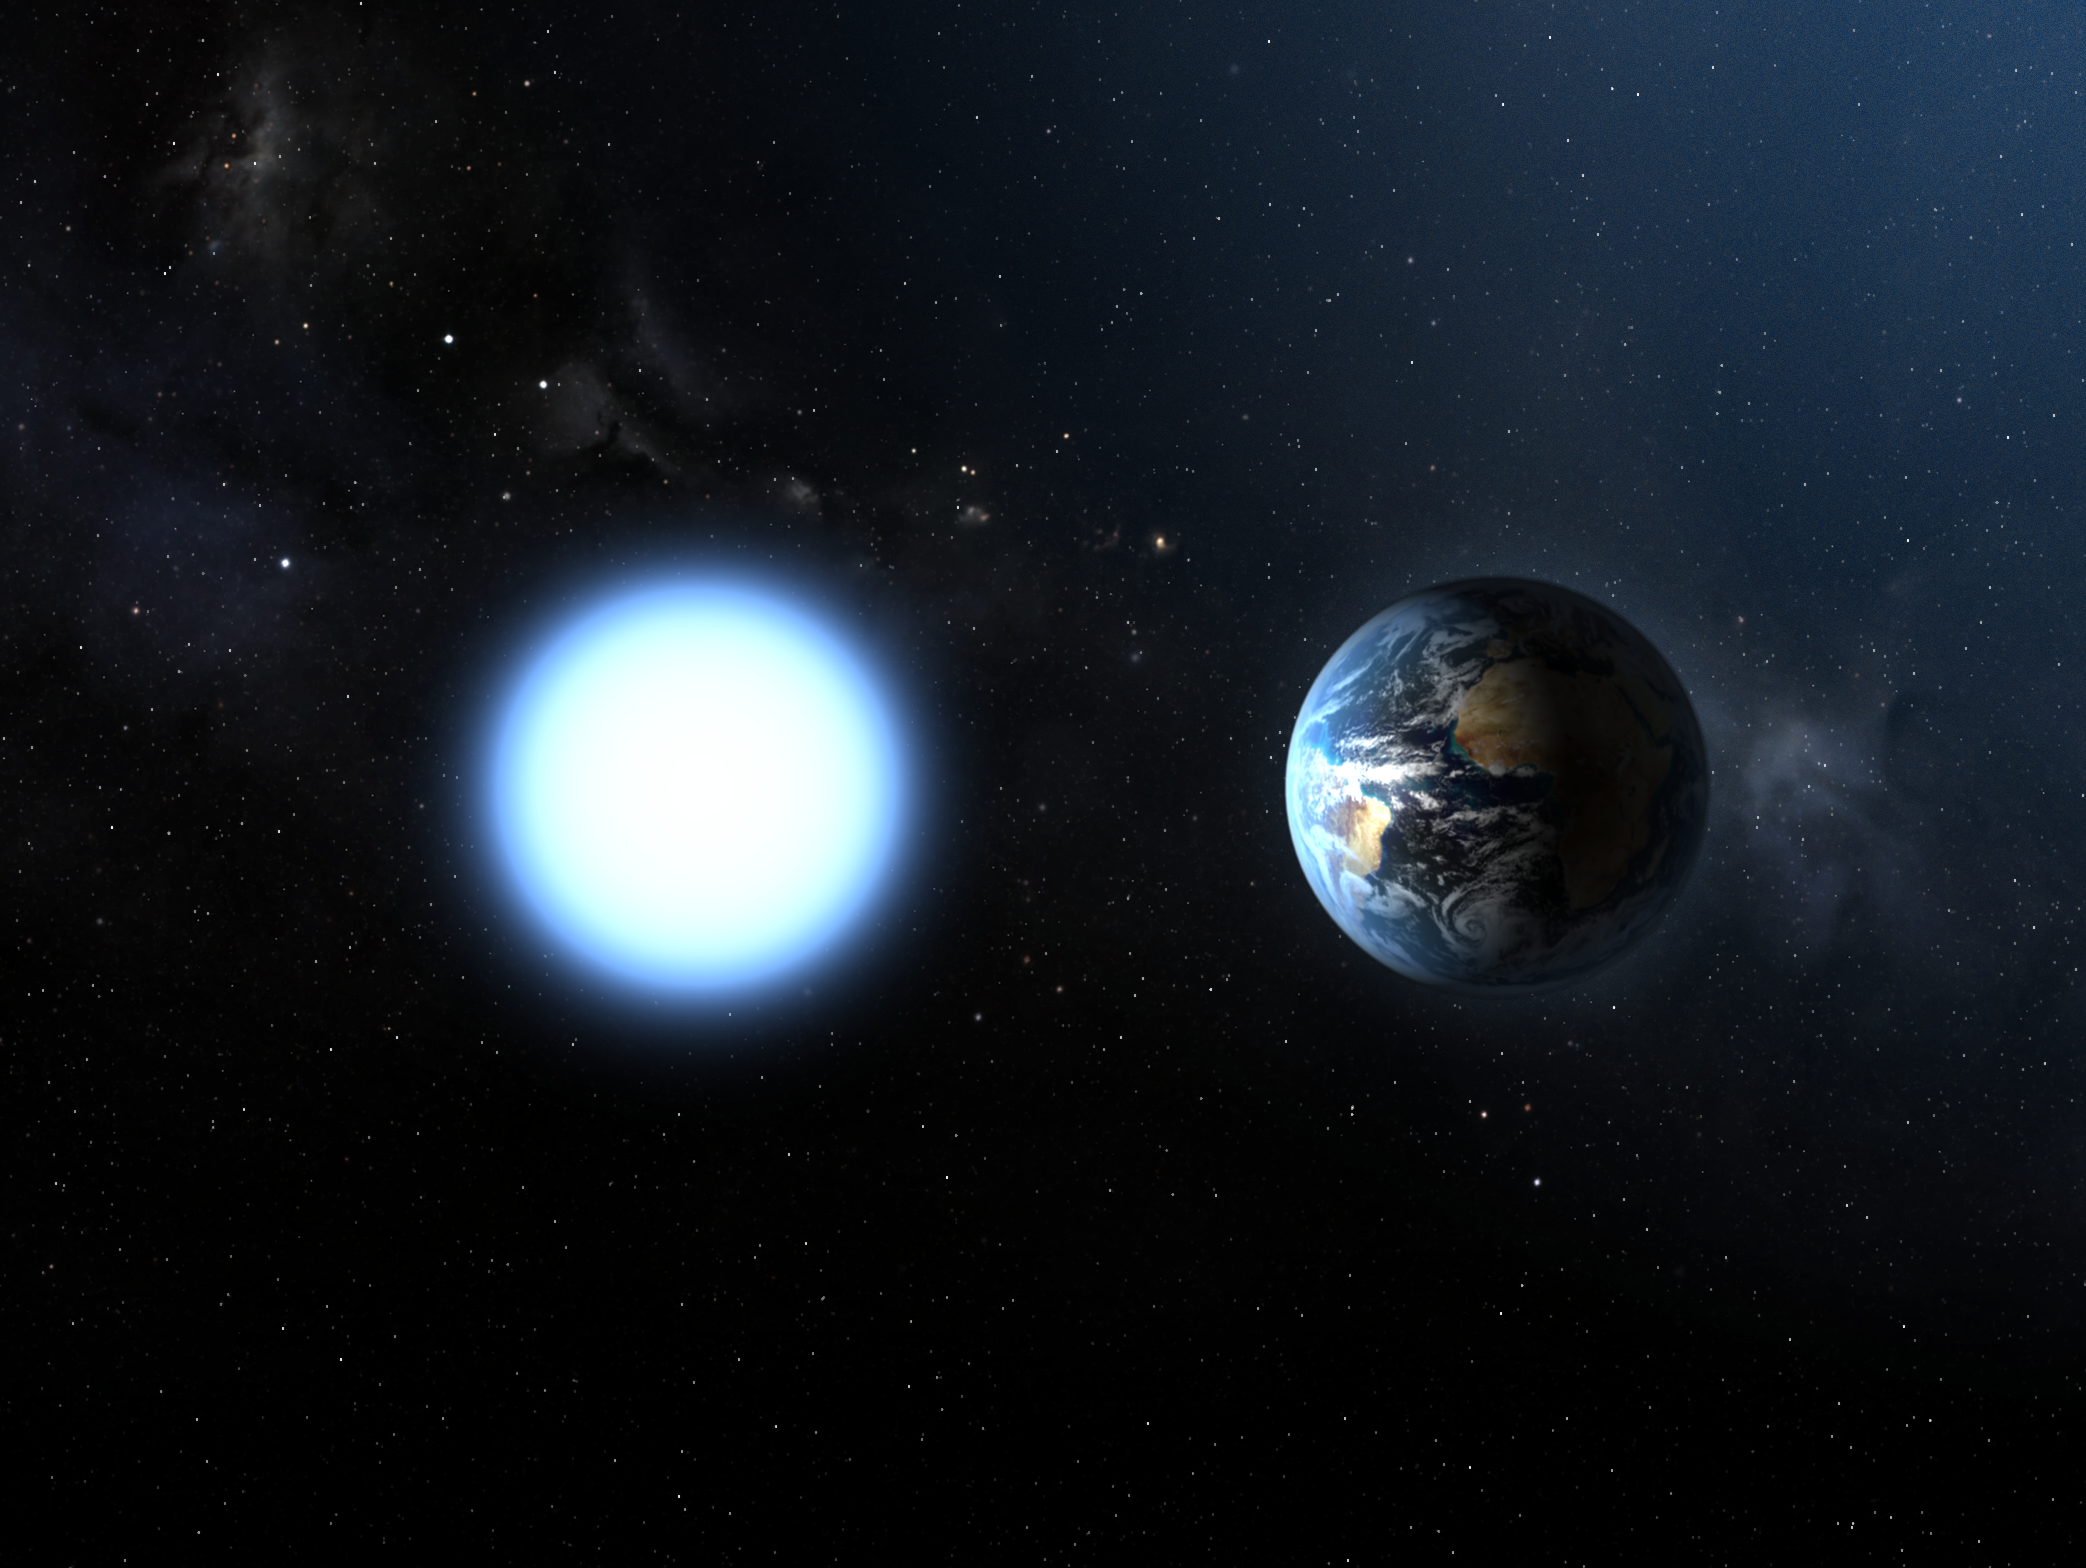

Artist's impression of the sizes of Sirius B and the Earth

Based on the Hubble measurements made with the Space Telescope Imaging Spectrograph, an international team found that Sirius B has a mass that is 98 percent that of our own Sun. Despite this large mass Sirius B is only 12,000 kilometers in diameter, making it smaller than even the Earth and much denser. Sirius B's powerful gravitational field is 350,000 times greater than Earth's, meaning that a 68 kilogram person would weigh 25 million kilograms standing on its surface.

Credit: ESA and NASA